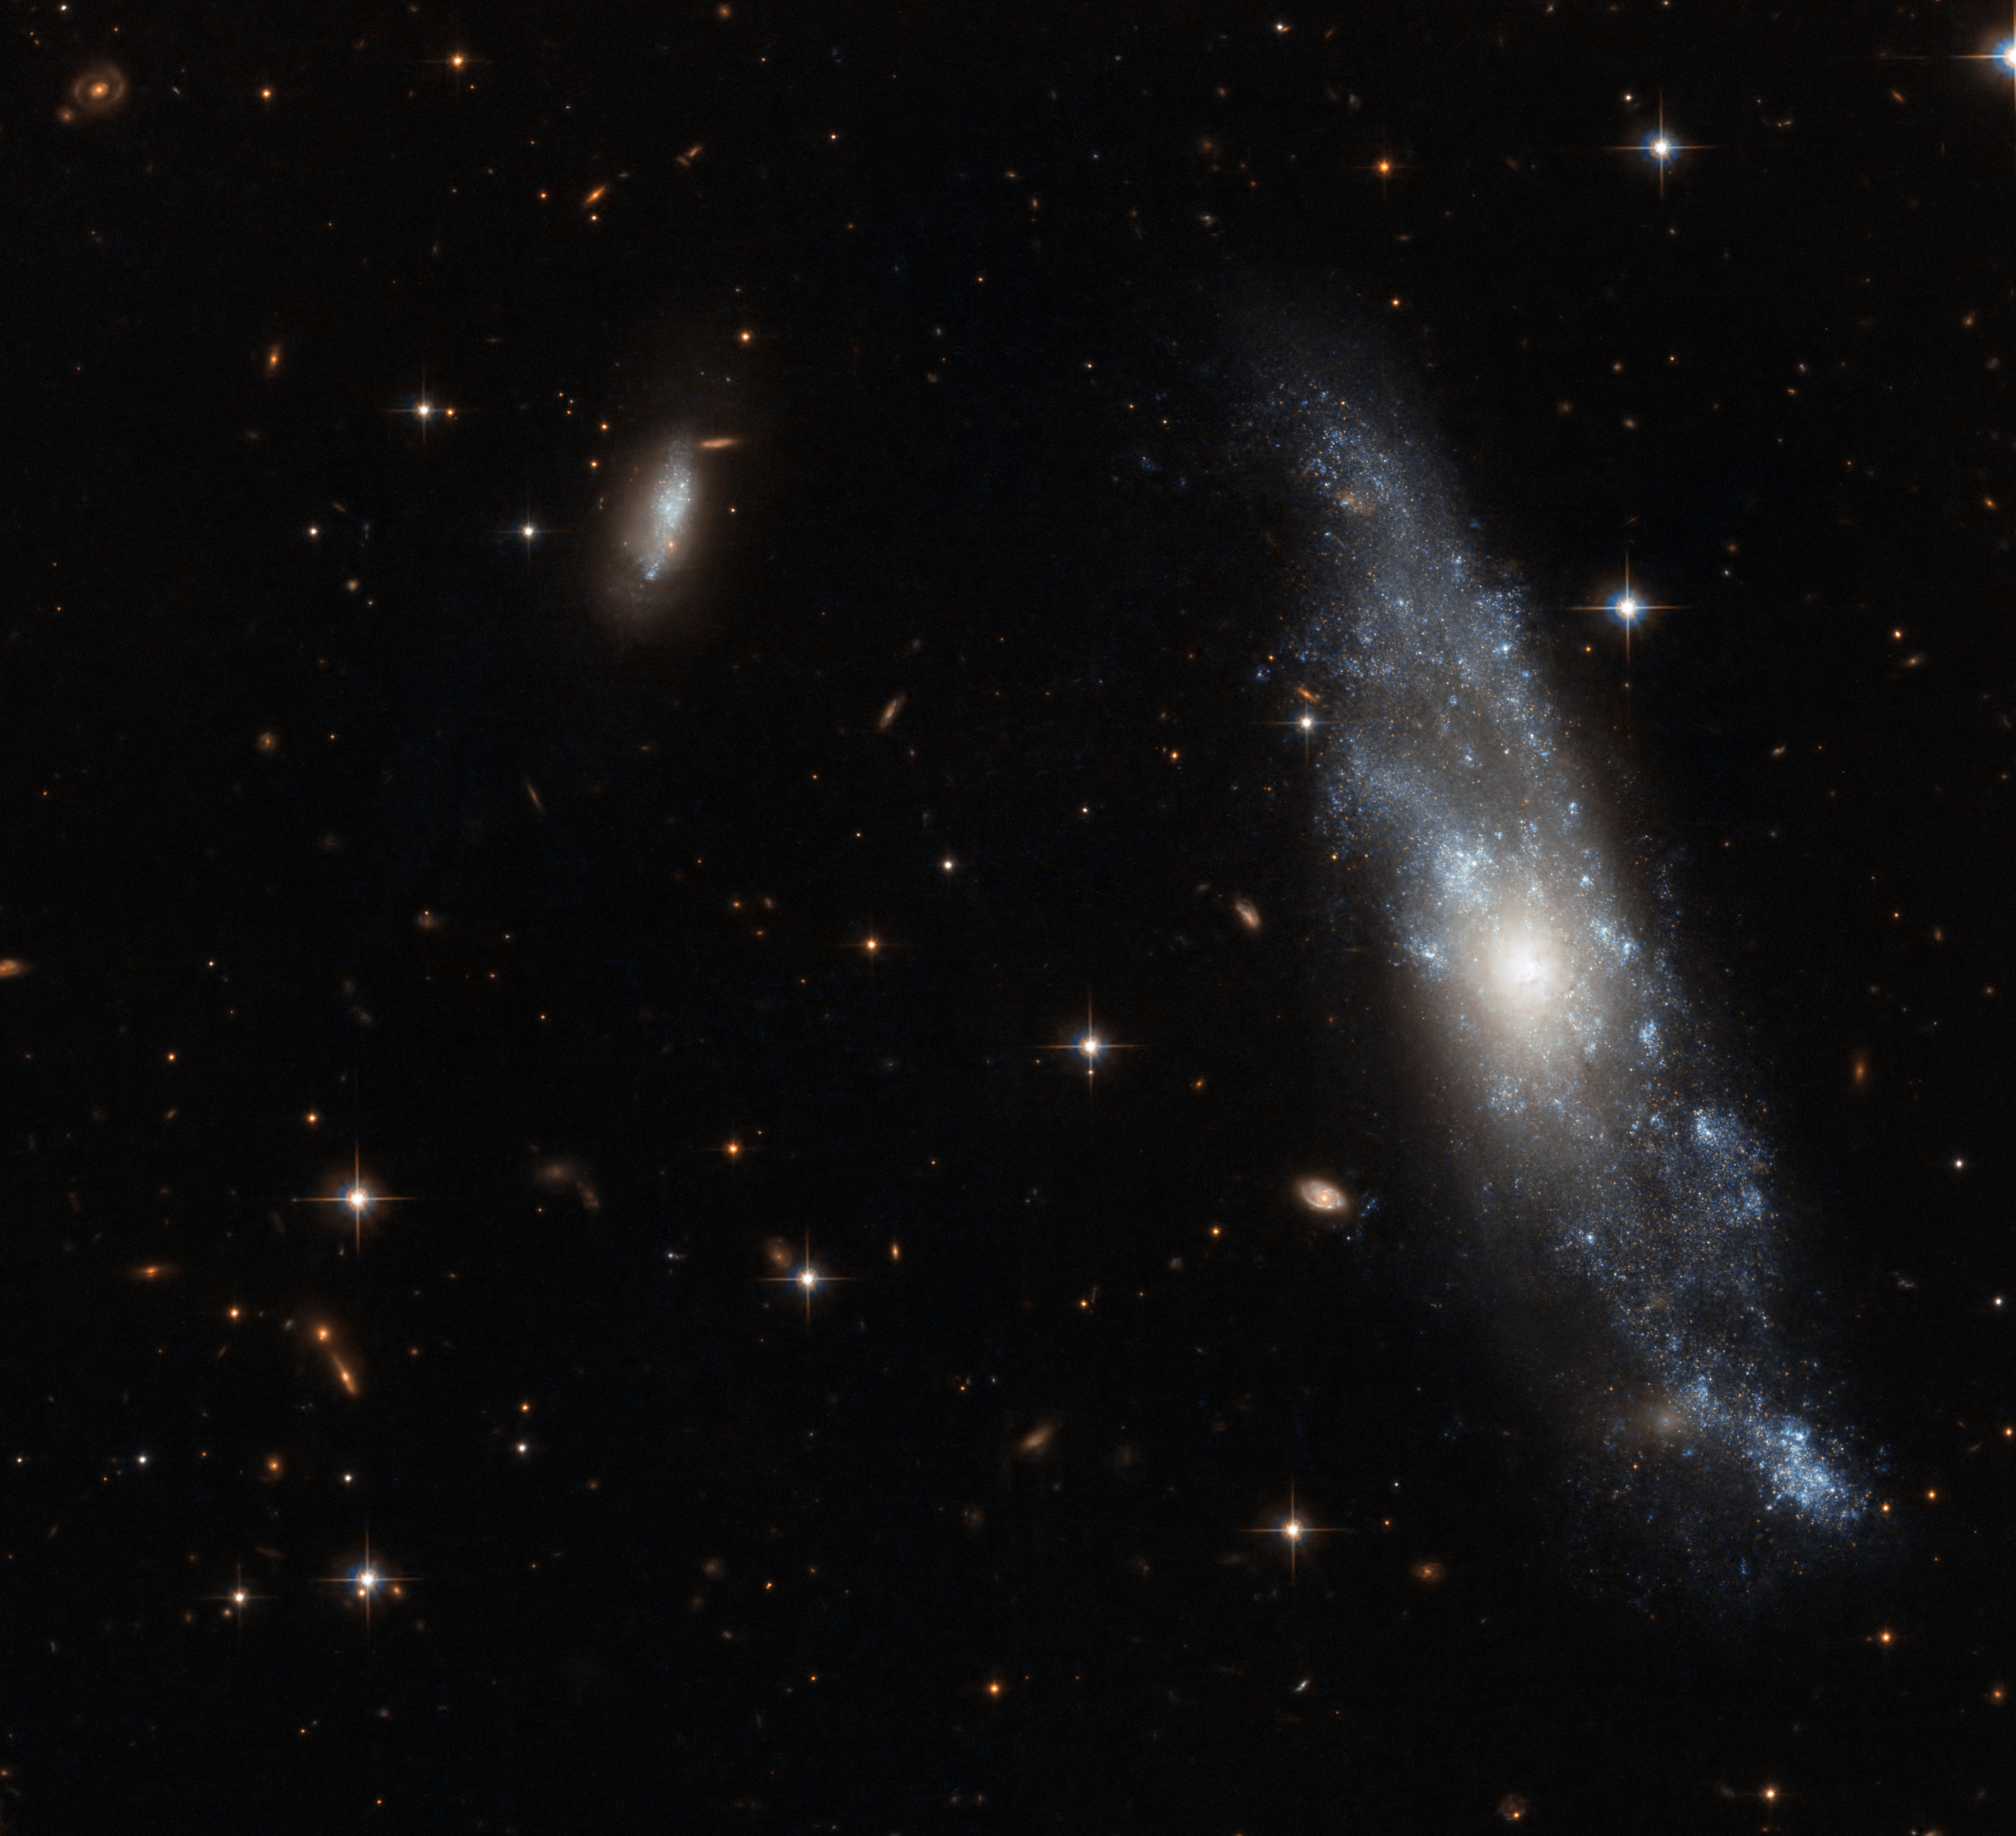

A fine Hydra spiral

The small spiral galaxy NGC 2758 is captured in great detail in this image from the Advanced Camera for Surveys (ACS) on the NASA/ESA Hubble Space Telescope. It was first seen by the American astronomer Frank Muller, at the McCormick Observatory in Virginia in the 1880s. This galaxy lies in the constellation of Hydra (the Sea Serpent), the largest and longest constellation in the sky. This very sharp Hubble image shows many of the bright blue stars within the galaxy’s loosely wound spiral arms as well as a bright companion dwarf galaxy to the upper left. Many more distant galaxies lie in the background.

NGC 2758 is a fine example of a spiral galaxy that is close enough for the structure to be seen very clearly. In this case the Hubble images were obtained as part of a study of the central redder “bulge” component of galaxies and how they form and evolve.

This picture was created from ACS Hubble images taken through blue (F435W) and near-infrared (F814W) filters. The exposure times were 1050 s per filter and the field of view was about 3.4 arcminutes across.

Credit: ESA/Hubble and NASA